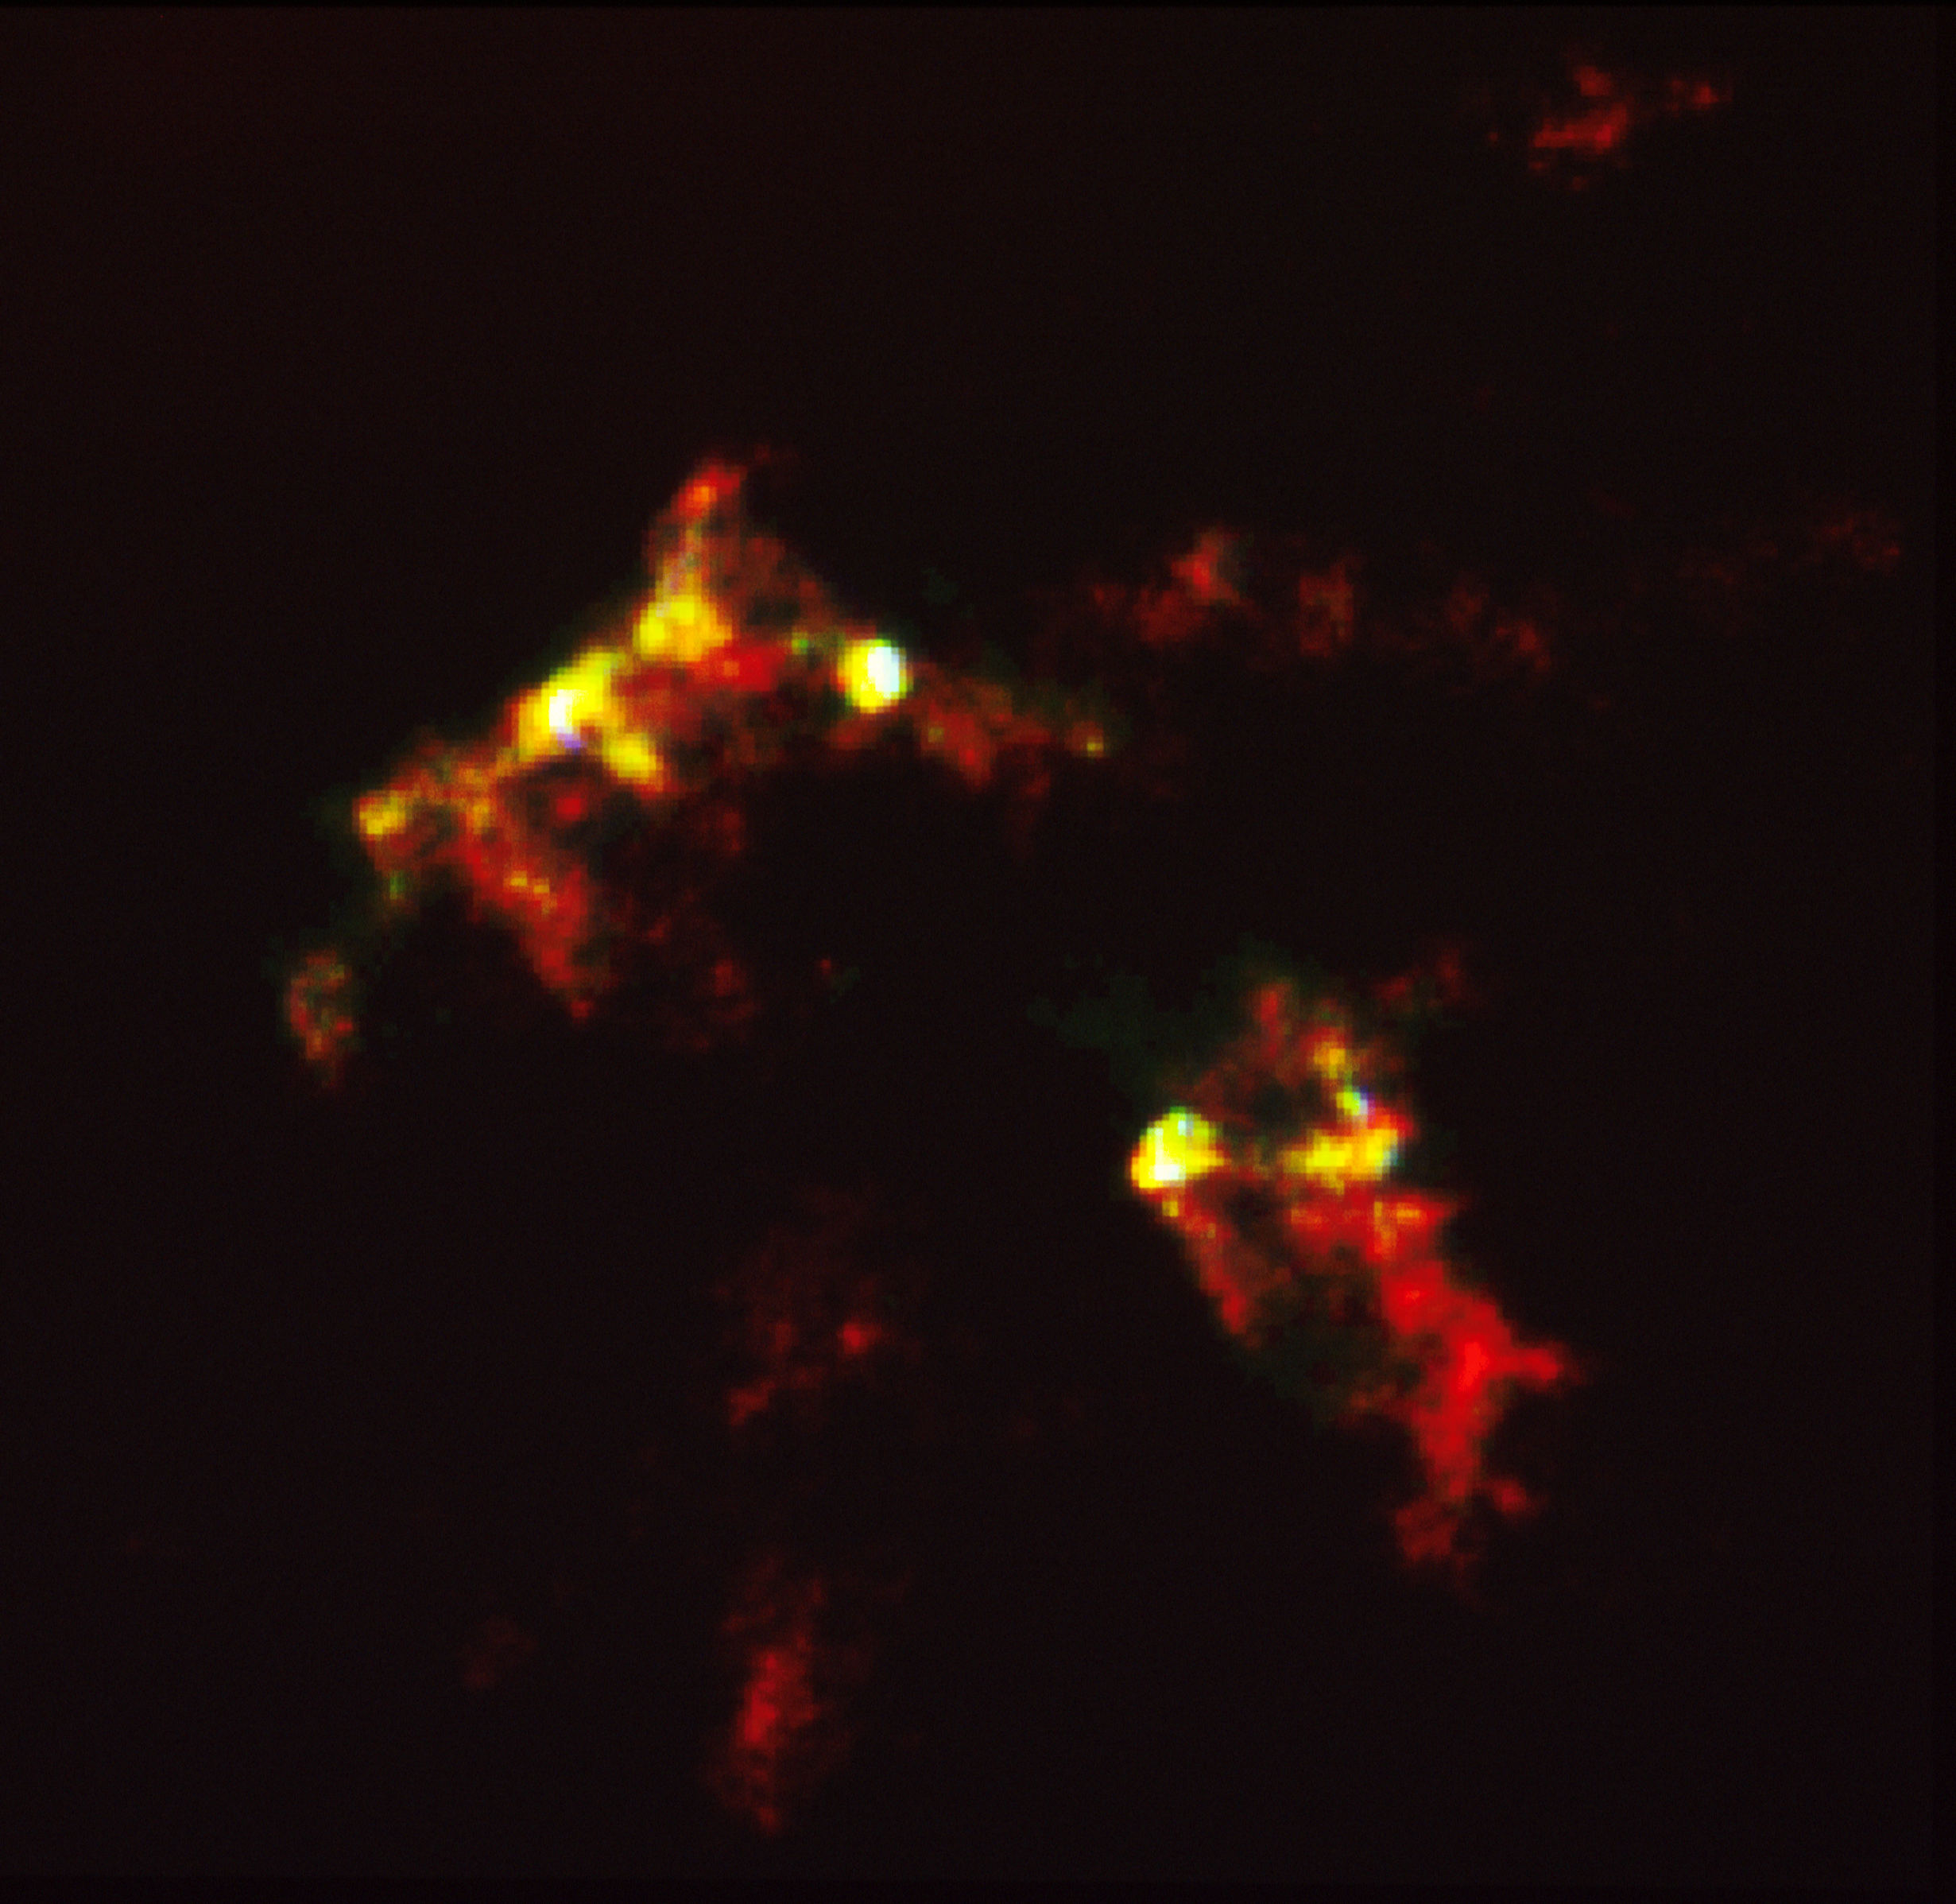

HST reveals growth processes of young star

A NASA/ESA Hubble Space Telescope (HST) image of a vast cloud of gas being heated by the birth of a new star. This image is being presented at the 182nd meeting of the American Astronomical Society in Berkeley, California.

Called Herbig-Haro object #2 (HH-2), the cloud is heated by shock waves from jets of high speed gas being ejected from a newborn star. Because the star itself is embedded in a dusty cocoon, HH-2 provides the only visible clues to physical processes occurring in the young star. The Hubble observations made with the Wide Field/Planetary Camera WF/PC) provide new insight into similar events that probably occurred when our Sun and Solar System formed 4.6 billion years ago.

Credit: Dick Schwatrz (Univ. of Missouri-St. Louis), and NASA/ESA